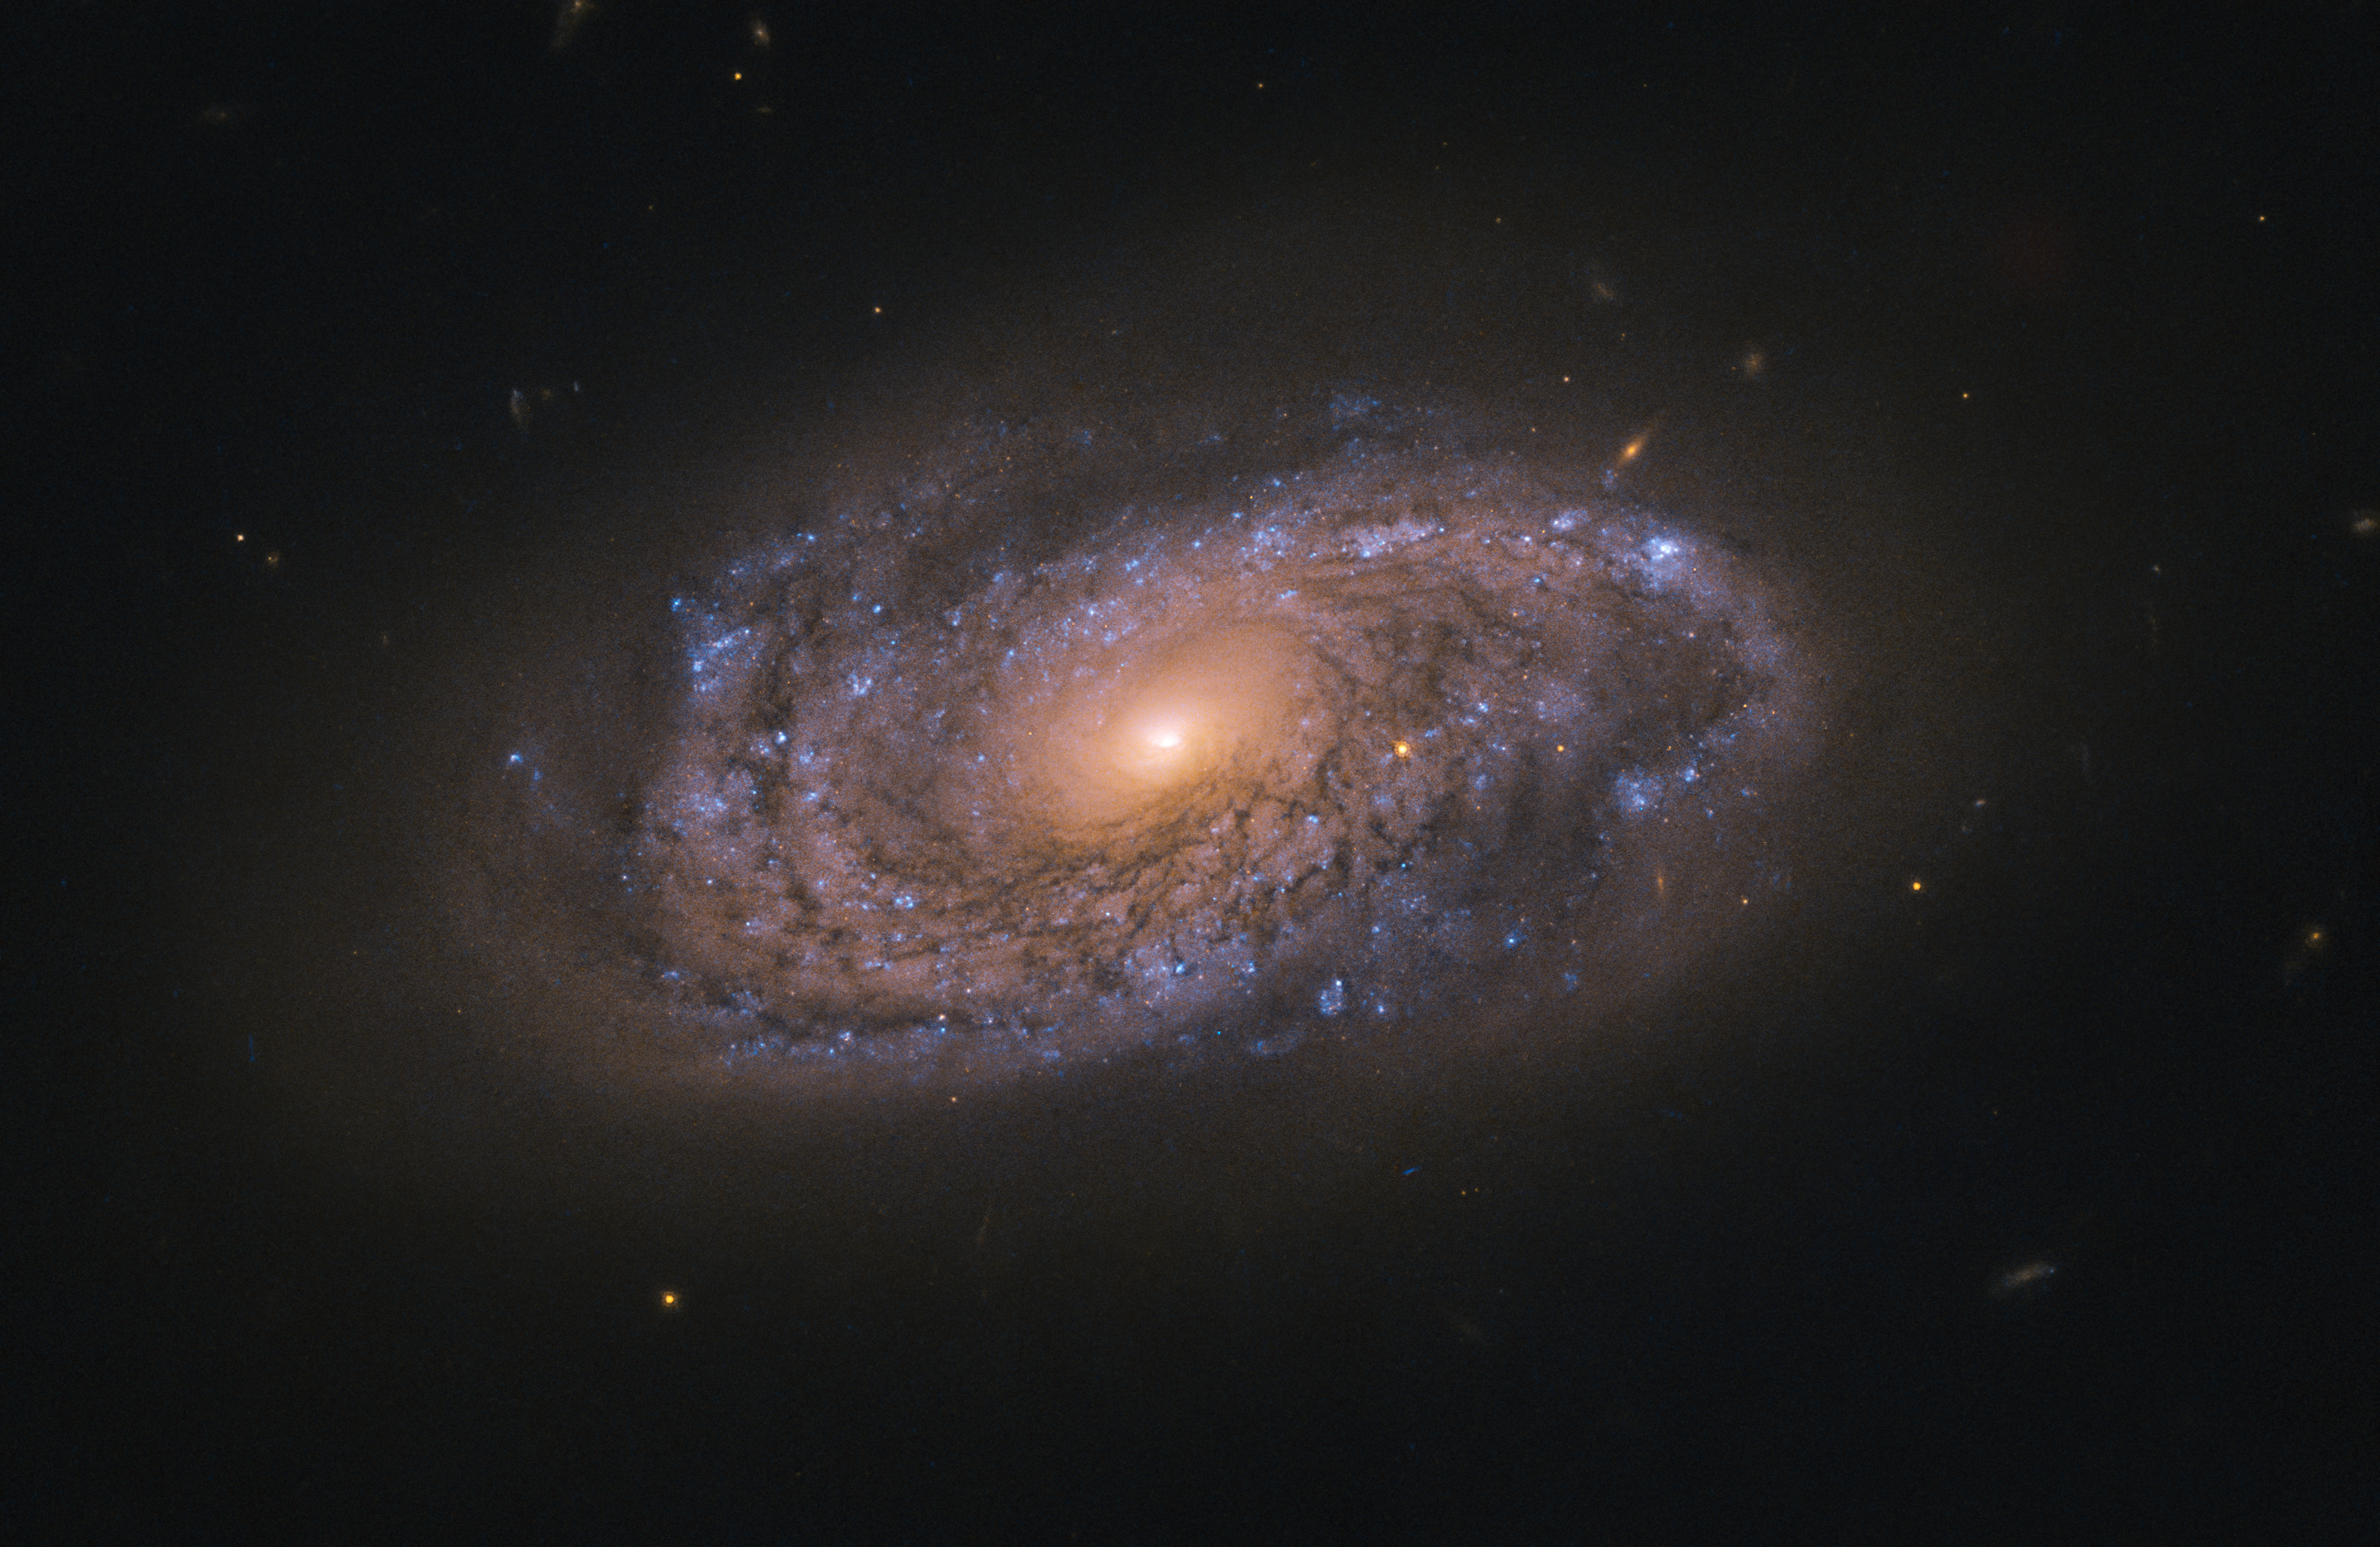

Hunting for Dead Stars

This image depicts a swirling spiral galaxy named NGC 2906.

The blue speckles seen scattered across this galaxy are massive young stars, which emit hot, blue-tinged radiation as they burn through their fuel at an immense rate. The swathes of orange are a mix of older stars that have swollen and cooled, and low-mass stars that were never especially hot to begin with. Owing to their lower temperatures, these stars emit a cooler, reddish, radiation.

This image of NGC 2906 was captured by the NASA/ESA Hubble Space Telescope’s Wide Field Camera 3, an instrument installed on Hubble in 2009 during the telescope’s fourth servicing mission. Hubble observed this galaxy on the hunt for fading light from recent, nearby occurrences of objects known as supernovae.

Credit: ESA/Hubble & NASA, A Filippenko